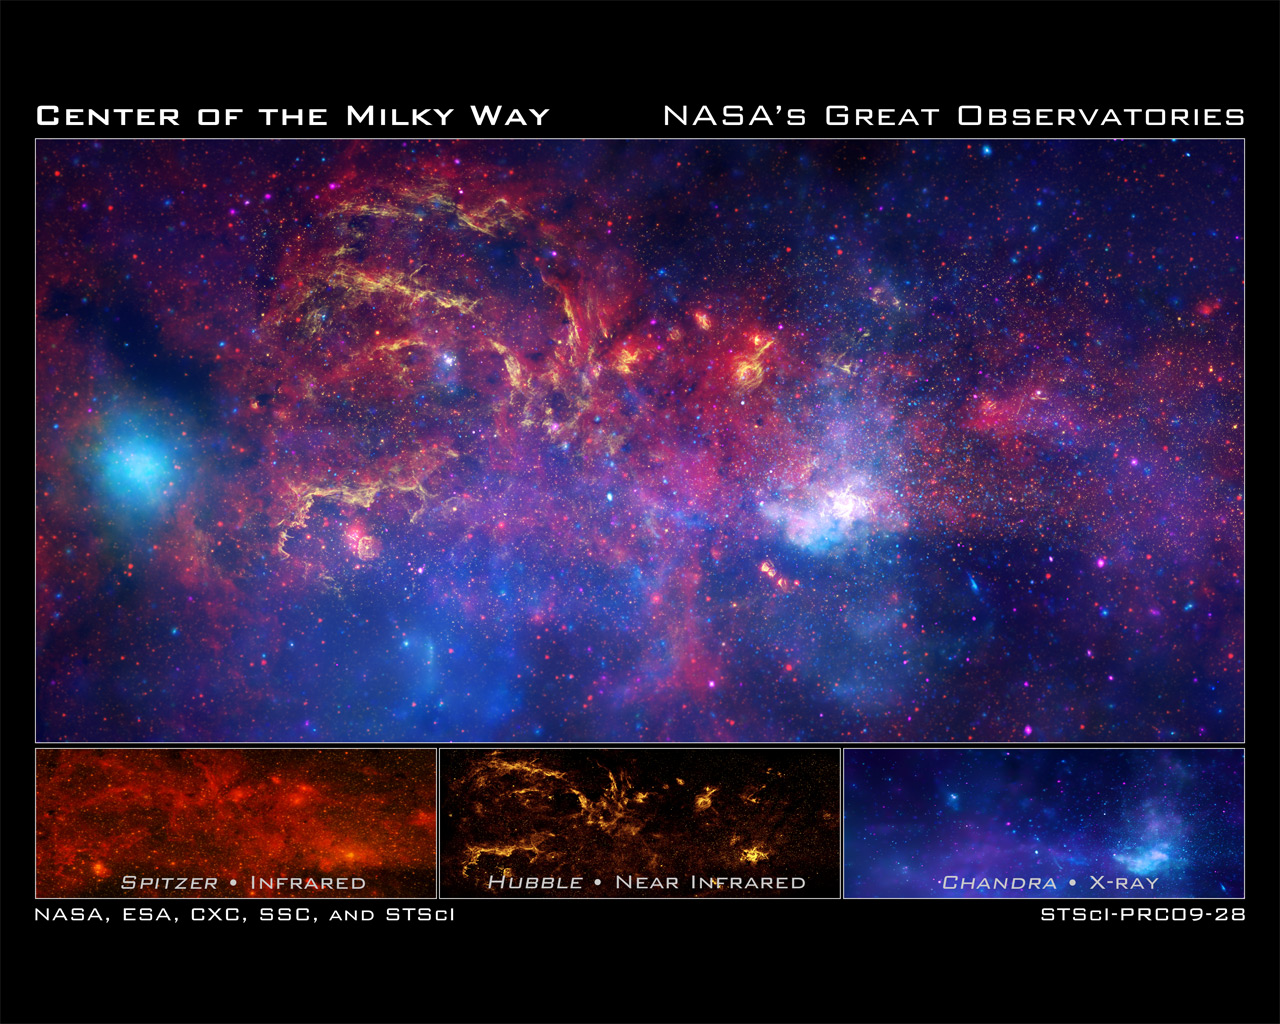

Views of the Galactic Center region from NASA's Great Observatories

In celebration of the International Year of Astronomy 2009, NASA's Great Observatories — the Hubble Space Telescope, the Spitzer Space Telescope, and the Chandra X-ray Observatory — have collaborated to produce an unprecedented image of the central region of our Milky Way galaxy.

Top Frame — The spectacular composite image combines observations using infrared light and X-ray light that see through the obscuring dust and reveal the intense activity near the galactic core. Note that the centre of the galaxy is located within the bright white region on the lower right-hand side of the image. Each telescope's contribution is presented in a different colour. Yellow represents the near-infrared observations of Hubble. Red represents the infrared observations of Spitzer. Blue and violet represent the X-ray observations of Chandra.

Bottom Left Frame — Spitzer's infrared-light observations provide a detailed and spectacular view of the galactic centre region. The swirling core of our galaxy harbours hundreds of thousands of stars that cannot be seen in visible light. These stars heat the nearby gas and dust. These dusty clouds glow in infrared light and reveal their often dramatic shapes. Some of these clouds harbour stellar nurseries that are forming new generations of stars. Like the downtown of a large city, the centre of our galaxy is a crowded, active, and vibrant place.

Bottom Middle Frame — Although best known for its visible-light images, Hubble also observes over a limited range of infrared light. The galactic centre is marked by the bright patch in the lower right. Along the left side are large arcs of warm gas that have been heated by clusters of bright massive stars. In addition, Hubble uncovered many more massive stars across the region. Winds and radiation from these stars create the complex structures seen in the gas throughout the image. This sweeping panorama is one of the sharpest infrared pictures ever made of the galactic centre region.

Bottom Right Frame — X-rays detected by Chandra expose a wealth of exotic objects and high-energy features. In this image, pink represents lower energy X-rays and blue indicates higher energy. Hundreds of small dots show emission from material around black holes and other dense stellar objects. A supermassive black hole — some four million times more massive than the Sun — resides within the bright region in the lower right. The diffuse X-ray light comes from gas heated to millions of degrees by outflows from the supermassive black hole, winds from giant stars, and stellar explosions. This central region is the most energetic place in our galaxy.

Credit: NASA, ESA, SSC, CXC, and STScI